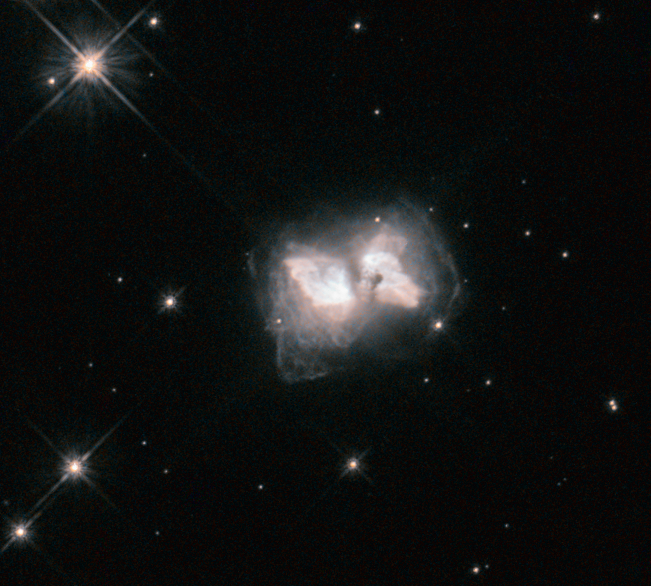

An interstellar butterfly

They say the flap of a butterfly's wings can set off a tornado on the other side of the world. But what happens when a butterfly flaps its wings in the depths of space?

This cosmic butterfly is a nebula known as AFGL 4104, or Roberts 22. Caused by a star that is nearing the end of its life and has shrugged off its outer layers, the nebula emerges as a cosmic chrysalis to produce this striking sight. Studies of the lobes of Roberts 22 have shown an amazingly complex structure, with countless intersecting loops and filaments.

A butterfly's life span is counted in weeks; although on a much longer timescale, this stage of life for Roberts 22 is also transient. It is currently a preplanetary nebula, a short-lived phase that begins once a dying star has pushed much of the material in its outer layers into space, and ends once this stellar remnant becomes hot enough to ionise the surrounding gas clouds and make them glow. About 400 years ago, the star at the centre of Roberts 22 shed its outer shells, which raced outwards to form this butterfly. The central star will soon be hot enough to ionise the surrounding gas, and it will evolve into a fully fledged planetary nebula.

Information about the nature, age, and structure of Roberts 22 was presented in a paper using Hubble data back in 1999, published in The Astronomical Journal.

Credit: NASA, ESA, and R. Sahai (Jet Propulsion Laboratory)